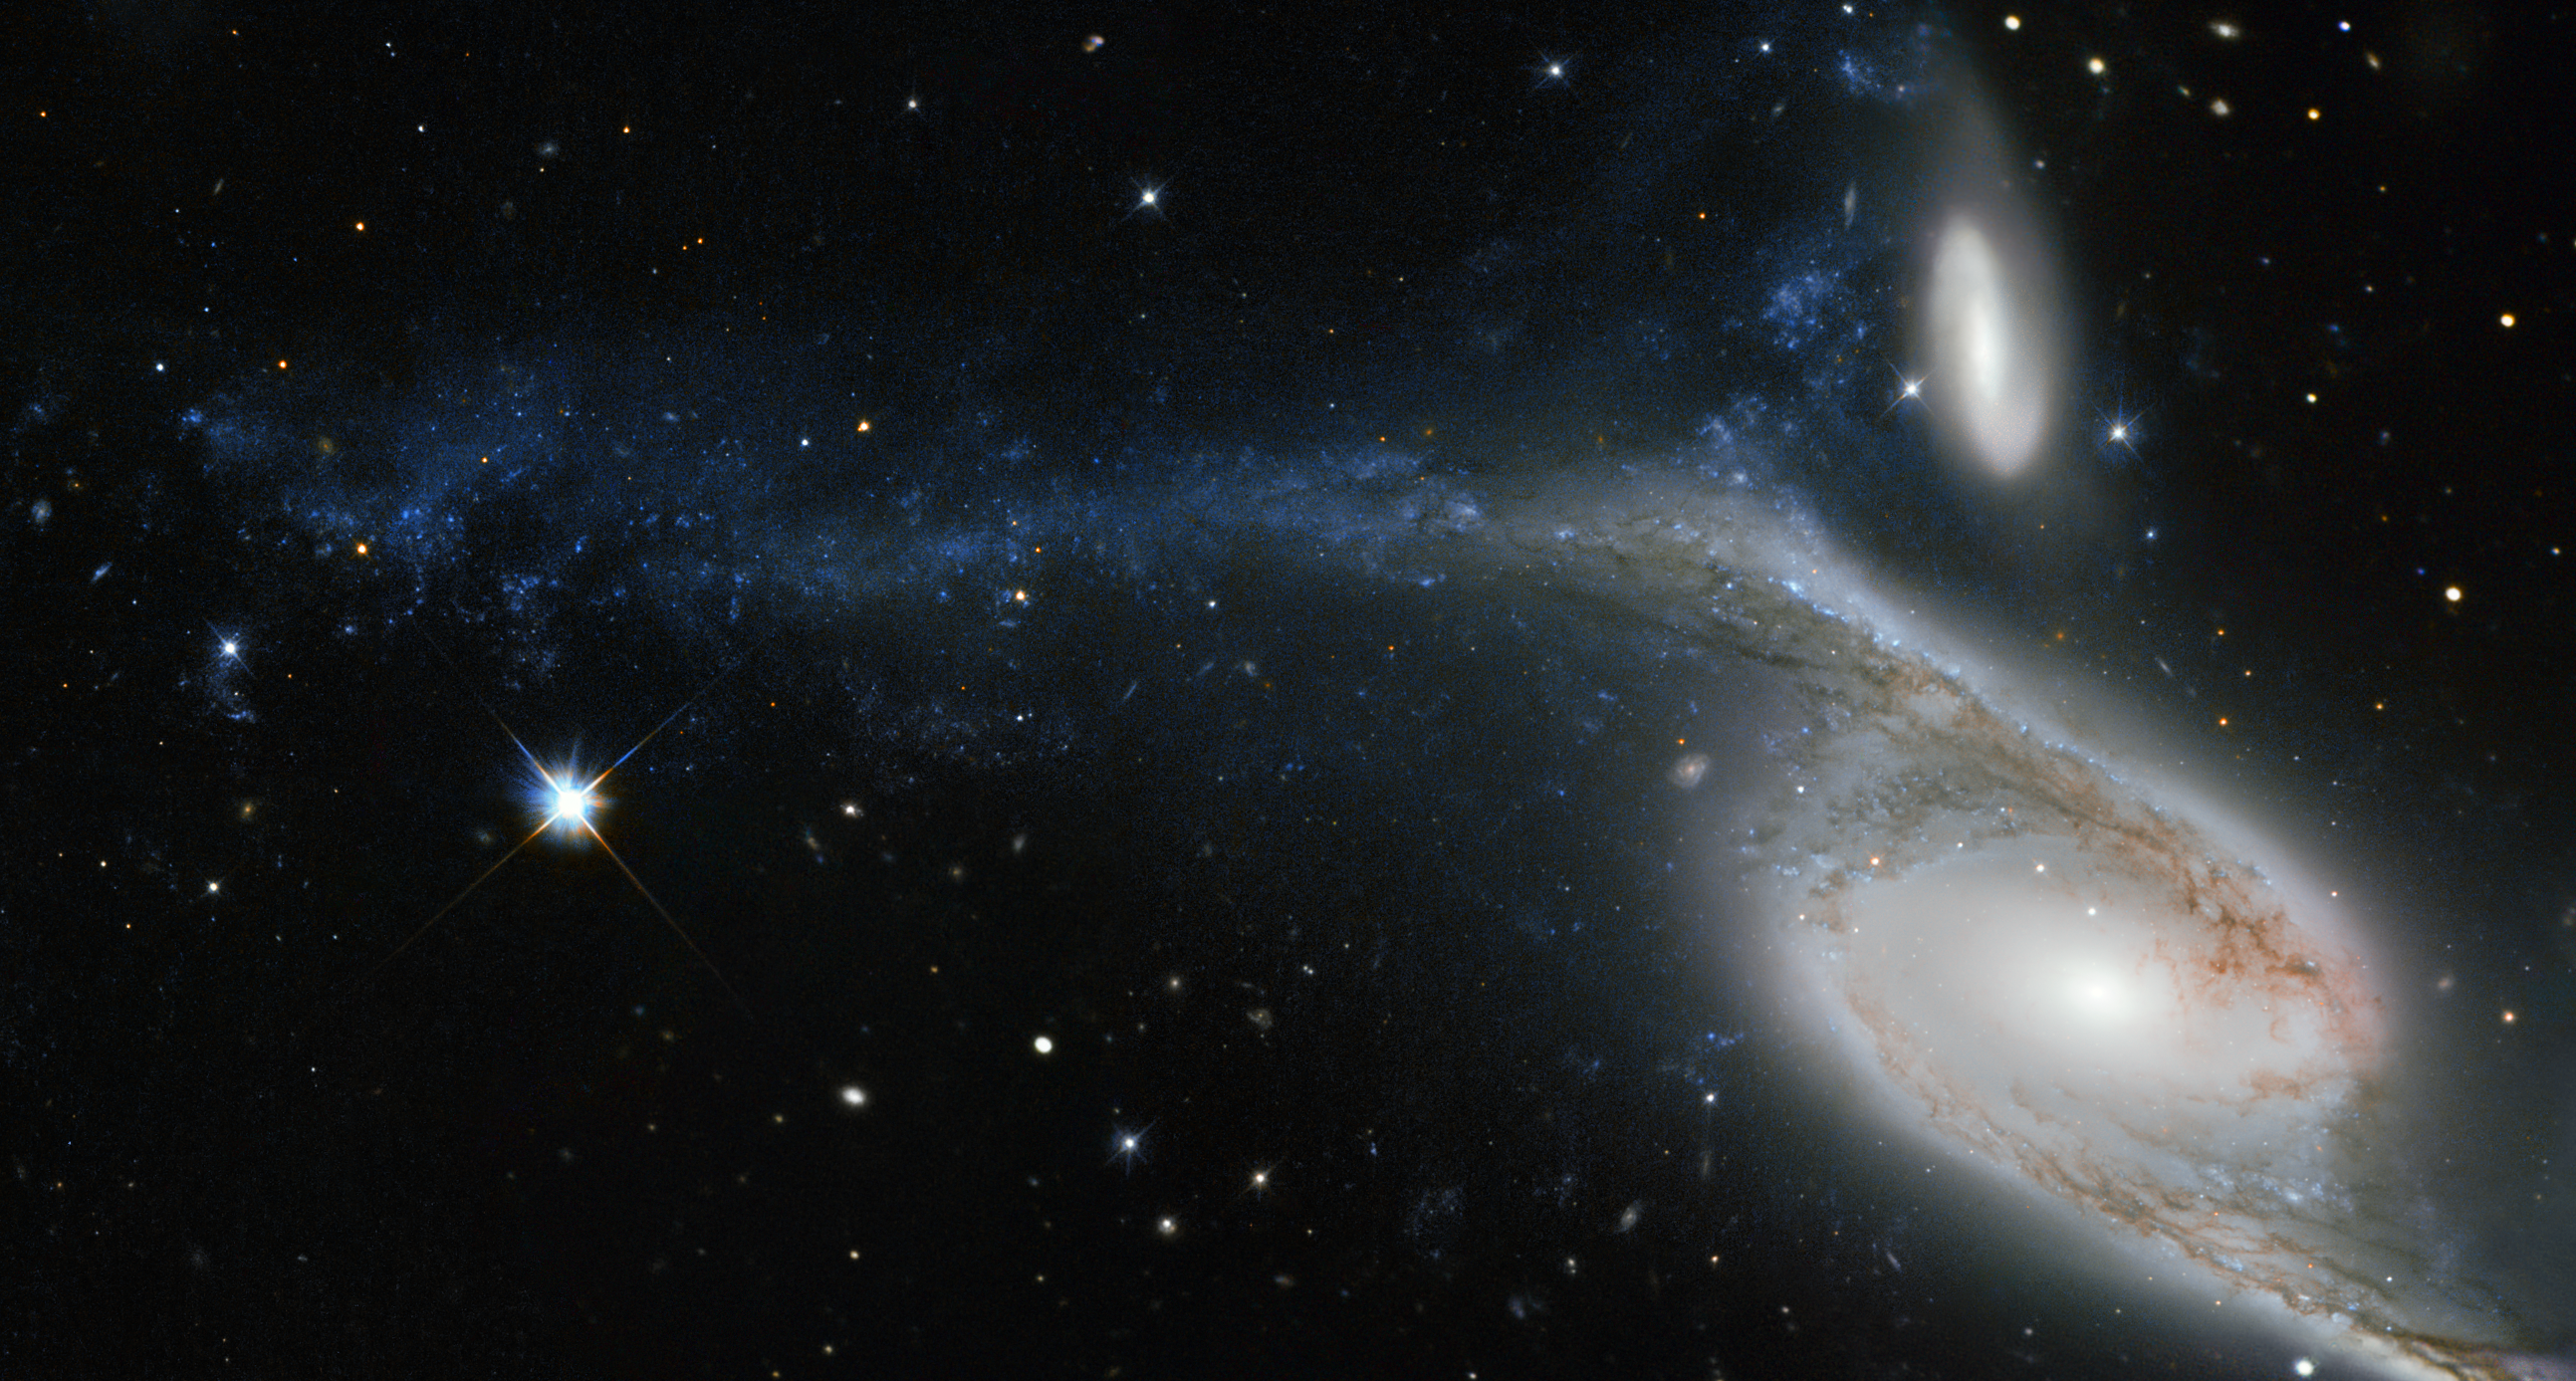

An interacting colossus

This picture, taken by the NASA/ESA Hubble Space Telescope’s Wide Field Planetary Camera 2 (WFPC2), shows a galaxy known as NGC 6872 in the constellation of Pavo (The Peacock). Its unusual shape is caused by its interactions with the smaller galaxy that can be seen just above NGC 6872, called IC 4970. They both lie roughly 300 million light-years away from Earth.

From tip to tip, NGC 6872 measures over 500 000 light-years across, making it the second largest spiral galaxy discovered to date. In terms of size it is beaten only by NGC 262, a galaxy that measures a mind-boggling 1.3 million light-years in diameter! To put that into perspective, our own galaxy, the Milky Way, measures between 100 000 and 120 000 light-years across, making NGC 6872 about five times its size.

The upper left spiral arm of NGC 6872 is visibly distorted and is populated by star-forming regions, which appear blue on this image. This may have been be caused by IC 4970 recently passing through this arm — although here, recent means 130 million years ago! Astronomers have noted that NGC 6872 seems to be relatively sparse in terms of free hydrogen, which is the basis material for new stars, meaning that if it weren’t for its interactions with IC 4970, NGC 6872 might not have been able to produce new bursts of star formation.

A version of this image was entered into the Hubble’s Hidden Treasures image processing competition by contestant Judy Schmidt.

Credit: ESA/Hubble & NASA Acknowledgement: Judy Schmidt (geckzilla.com)